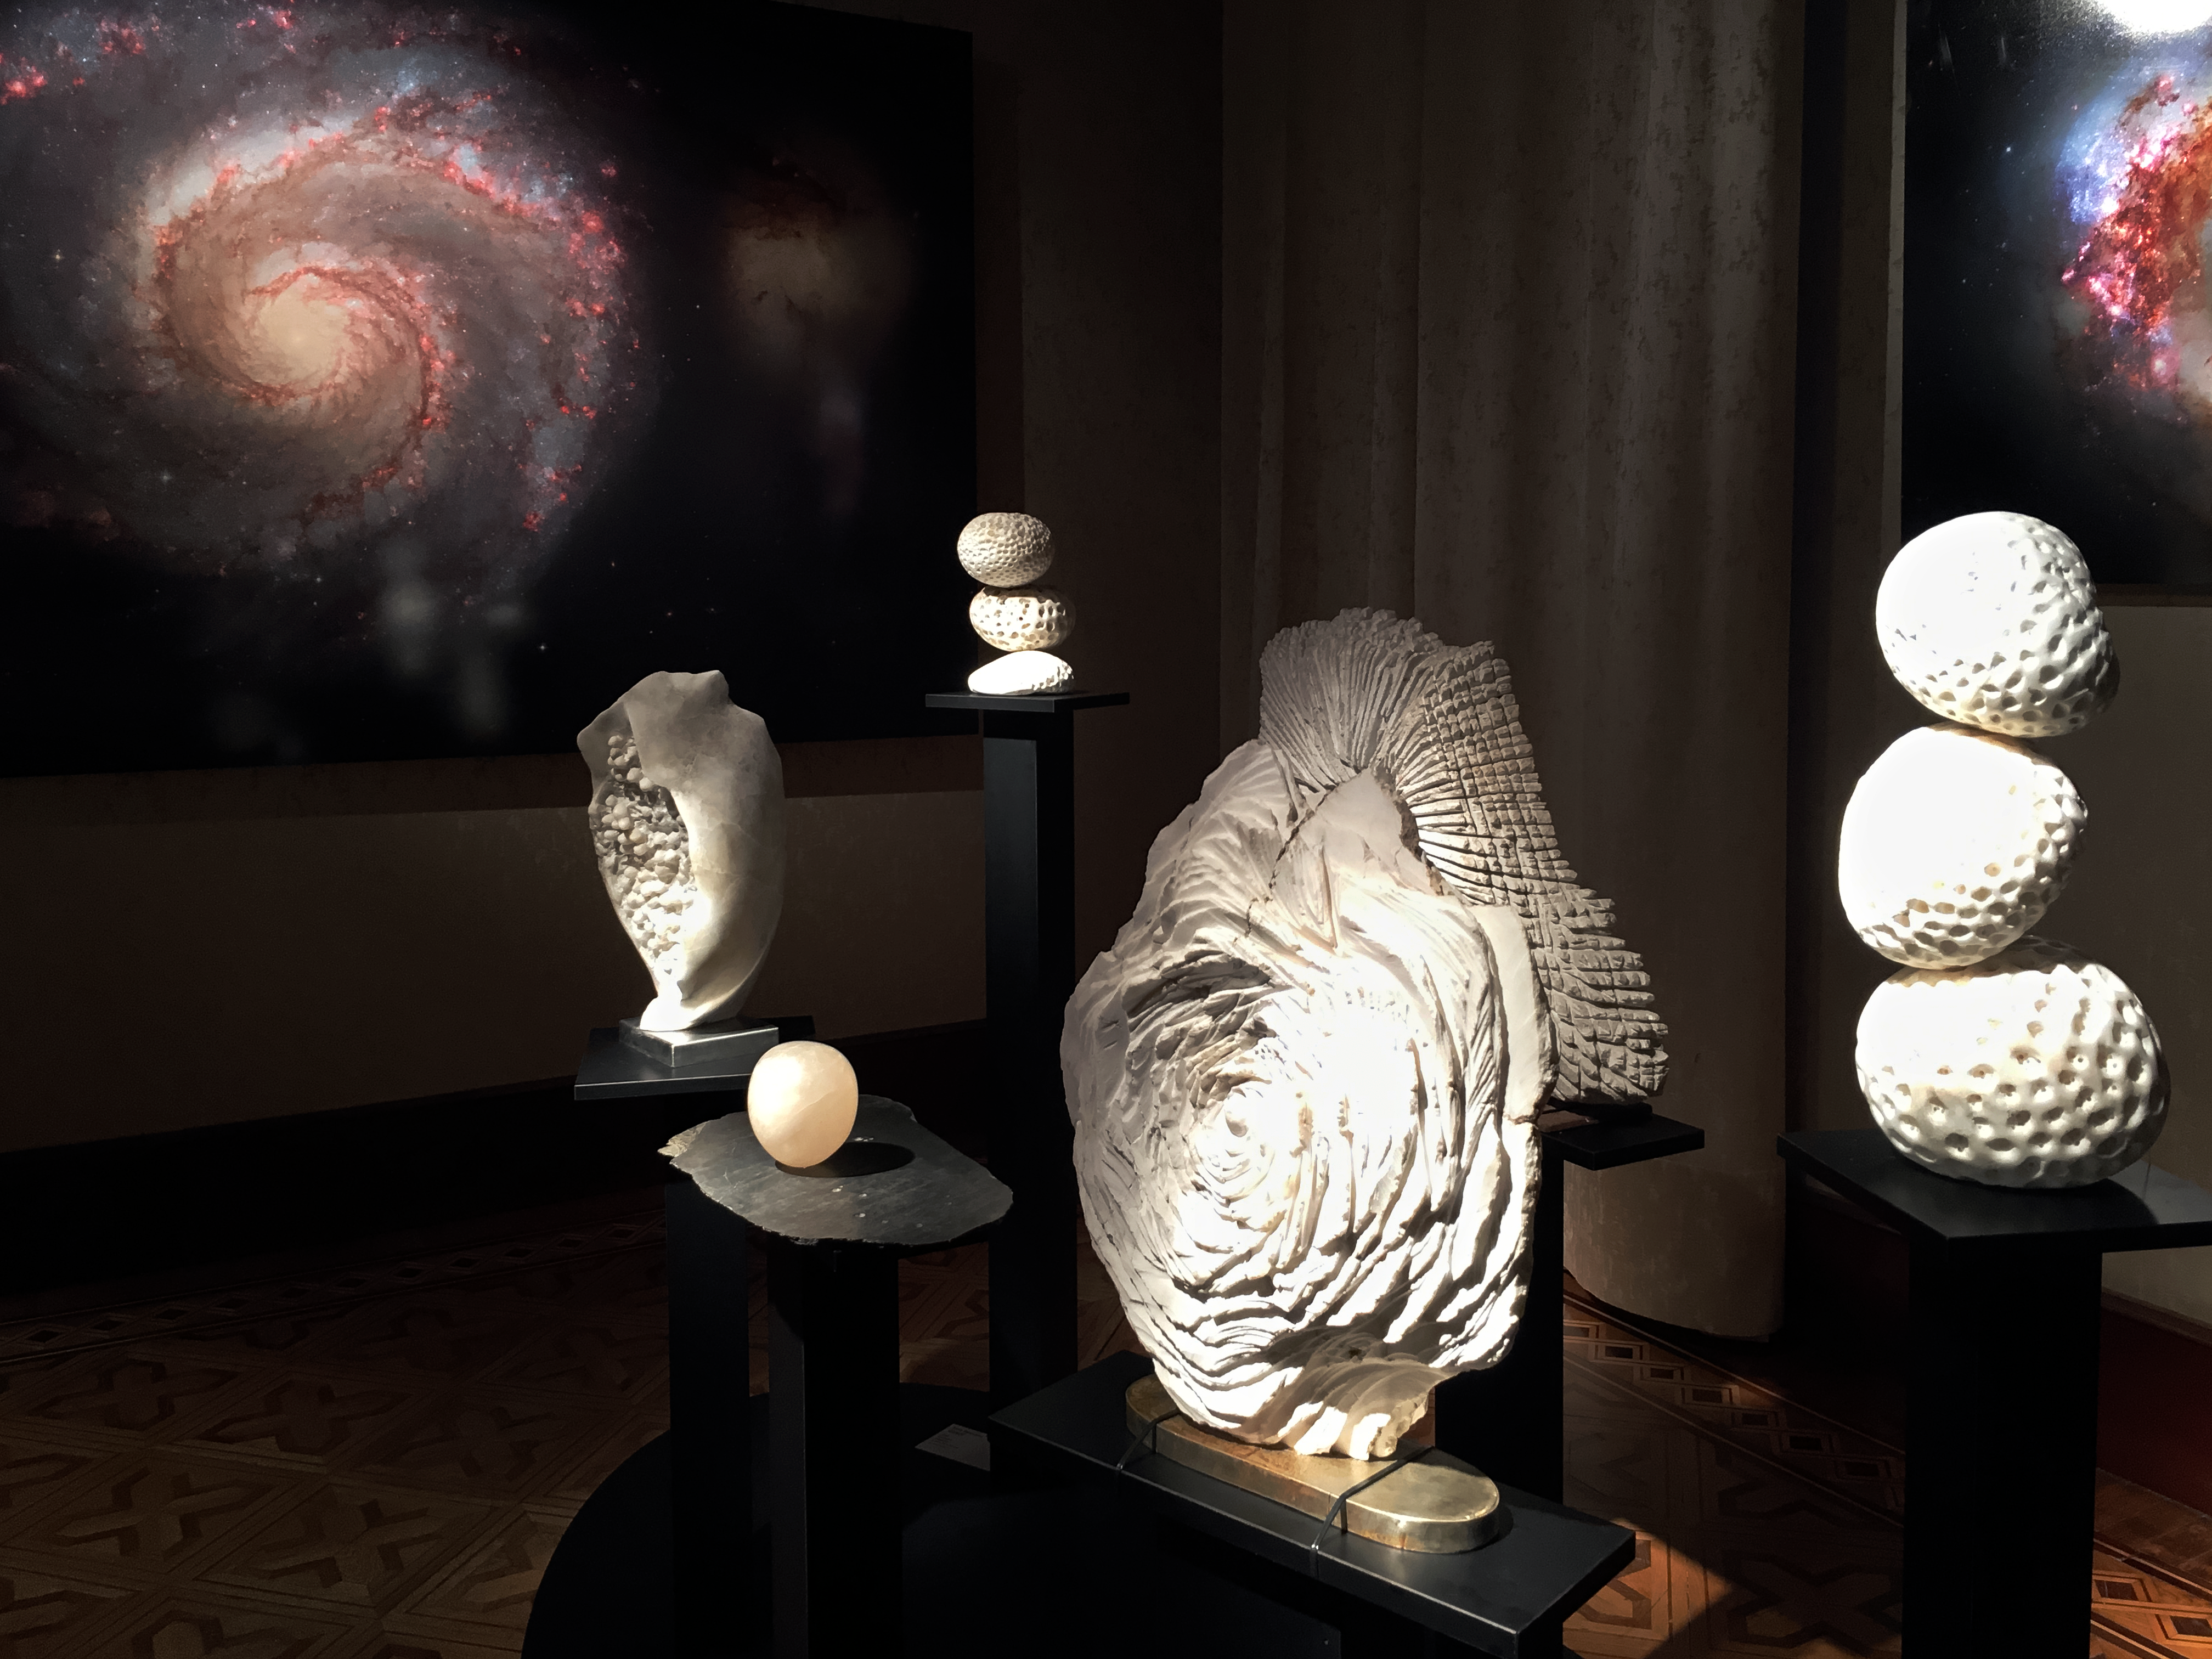

Frozen motion

Interacting and grouped galaxies were the inspiration for the alabaster sculptures by Sara Teresano. Her pieces are on display in the exhibition Our Place in Space.

Credit: ESA/Hubble, Pam Jeffries